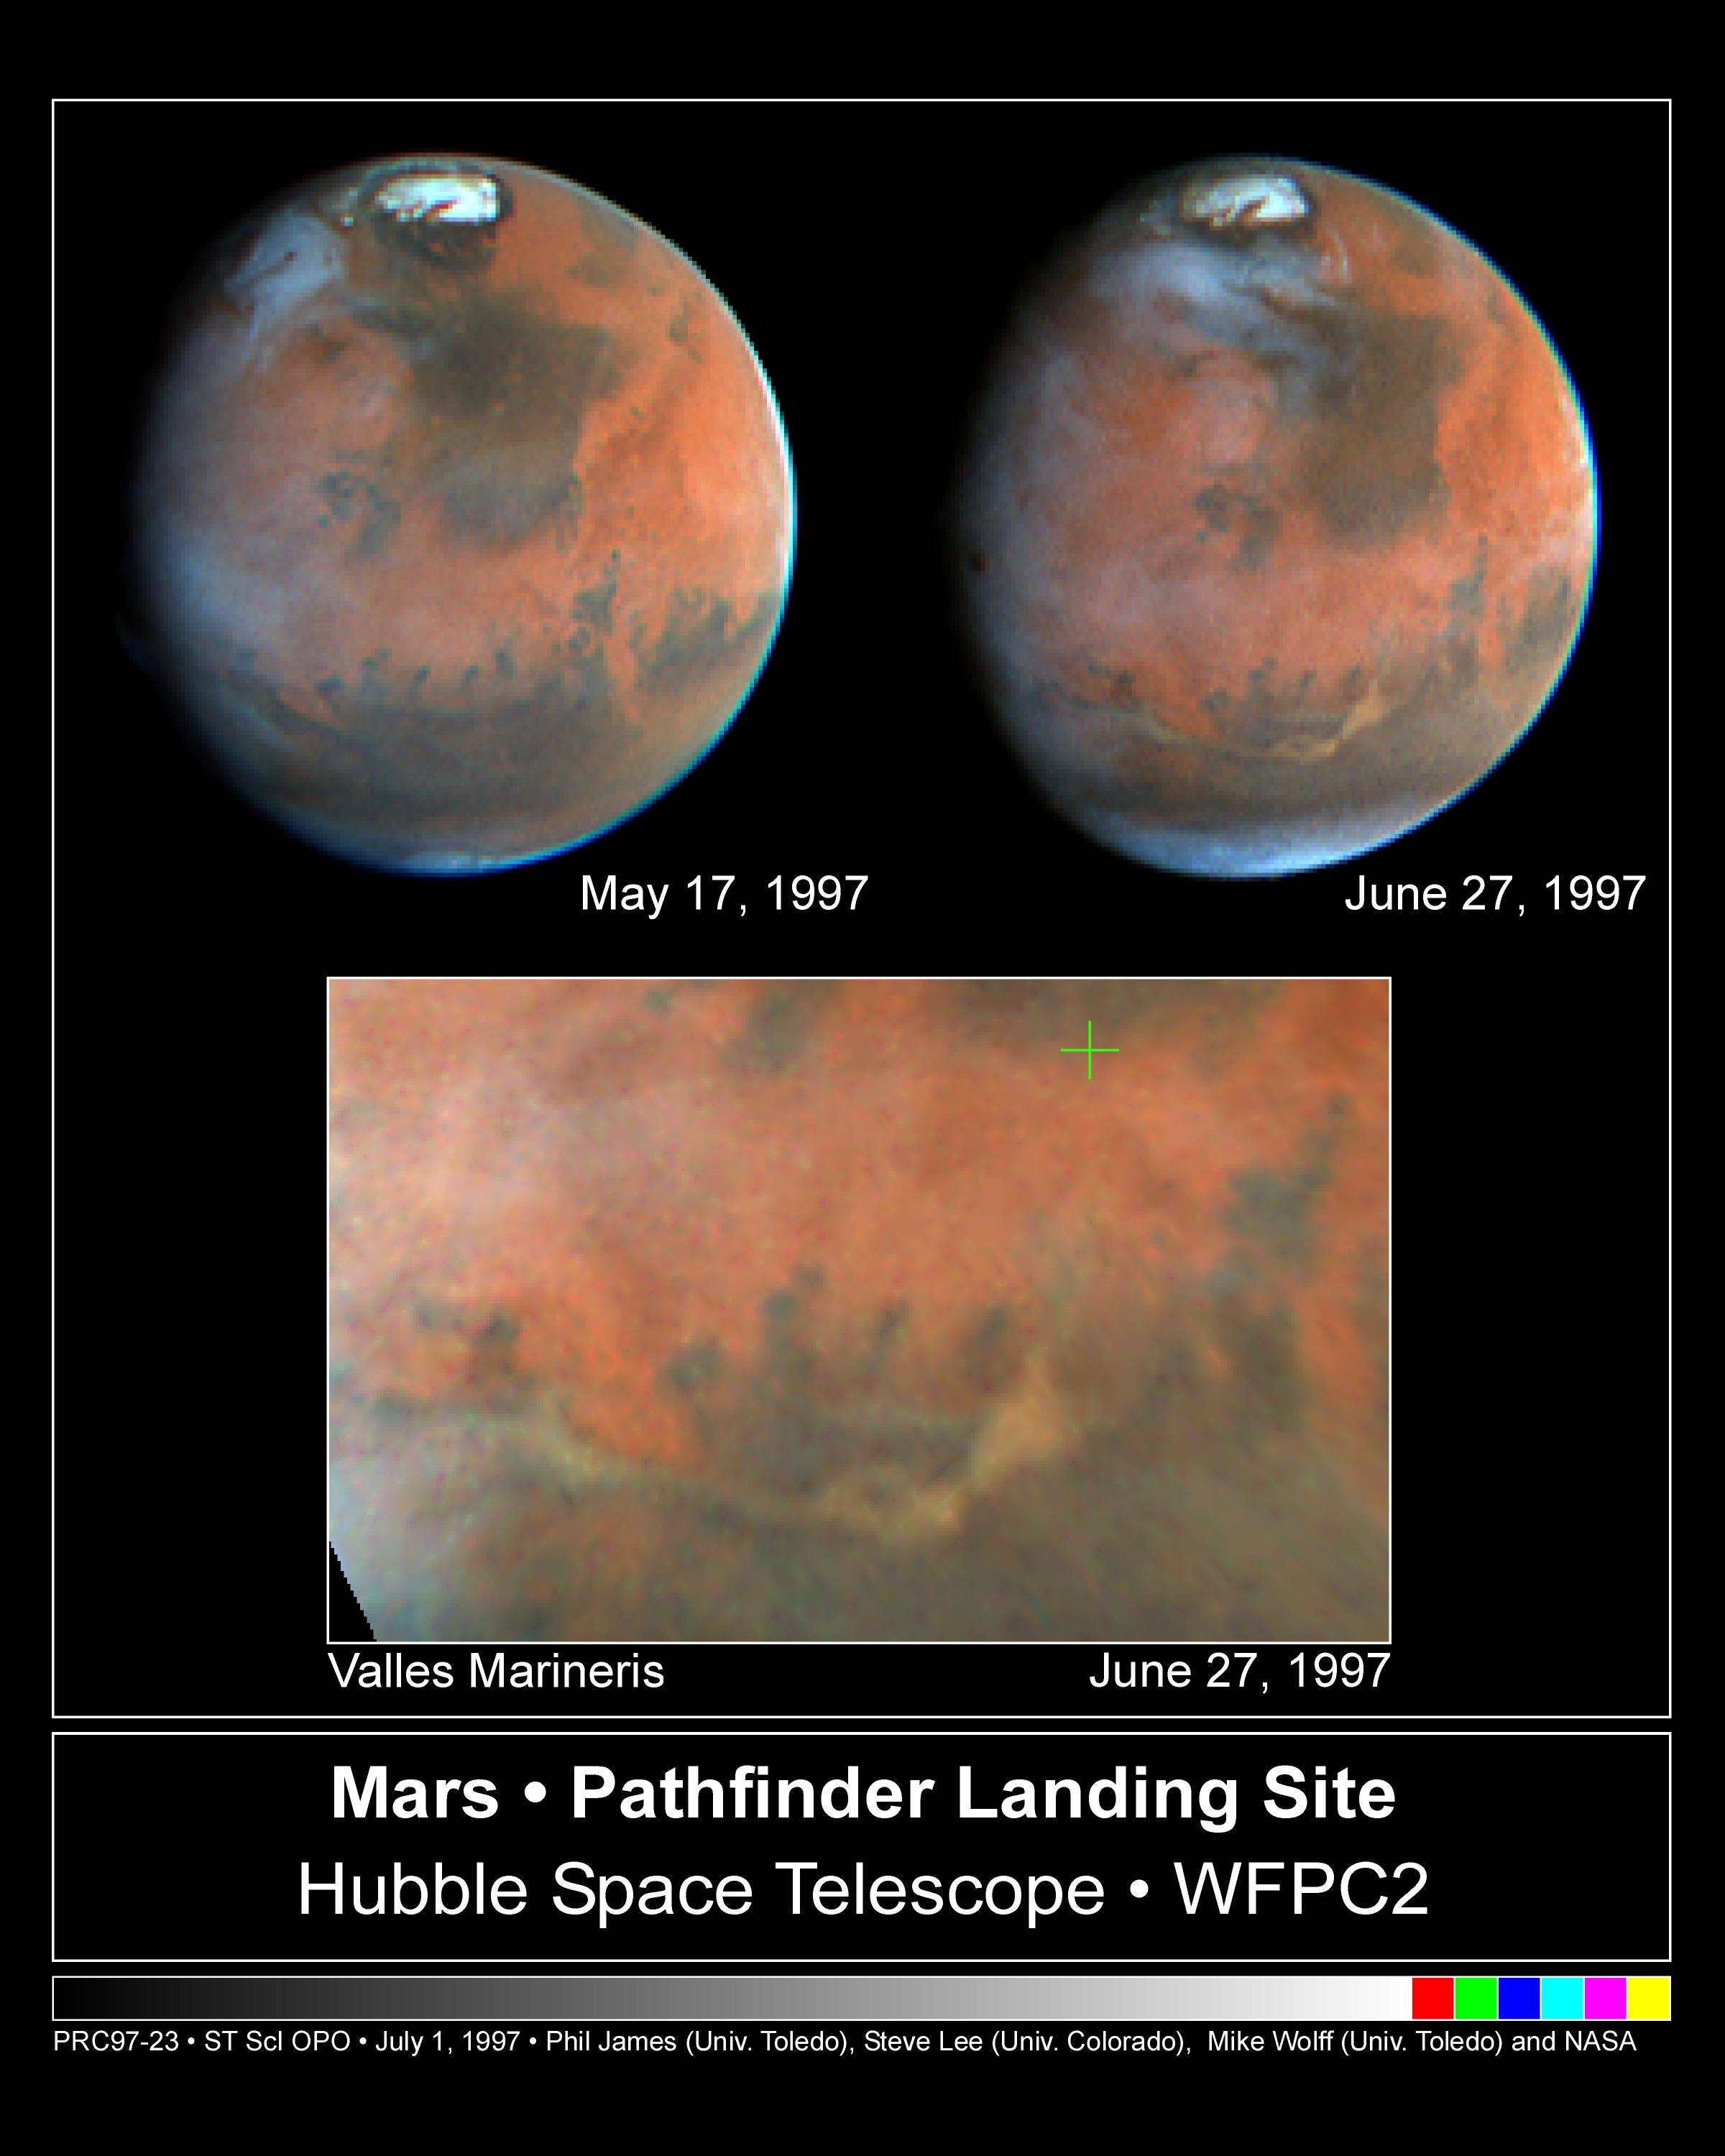

Mars Pathfinder Landing Site

Hubble Space Telescope images of Mars, taken on June 27, 1997, reveal a significant dust storm which fills much of the Valles Marineris canyon system and extends into Xanthe Terra, about 600 miles (1000 kilometers) south of the landing site.

Credit: Steve Lee (University of Colorado), Mike Wolff and Phil James (University of Toledo) and NASA/ESA